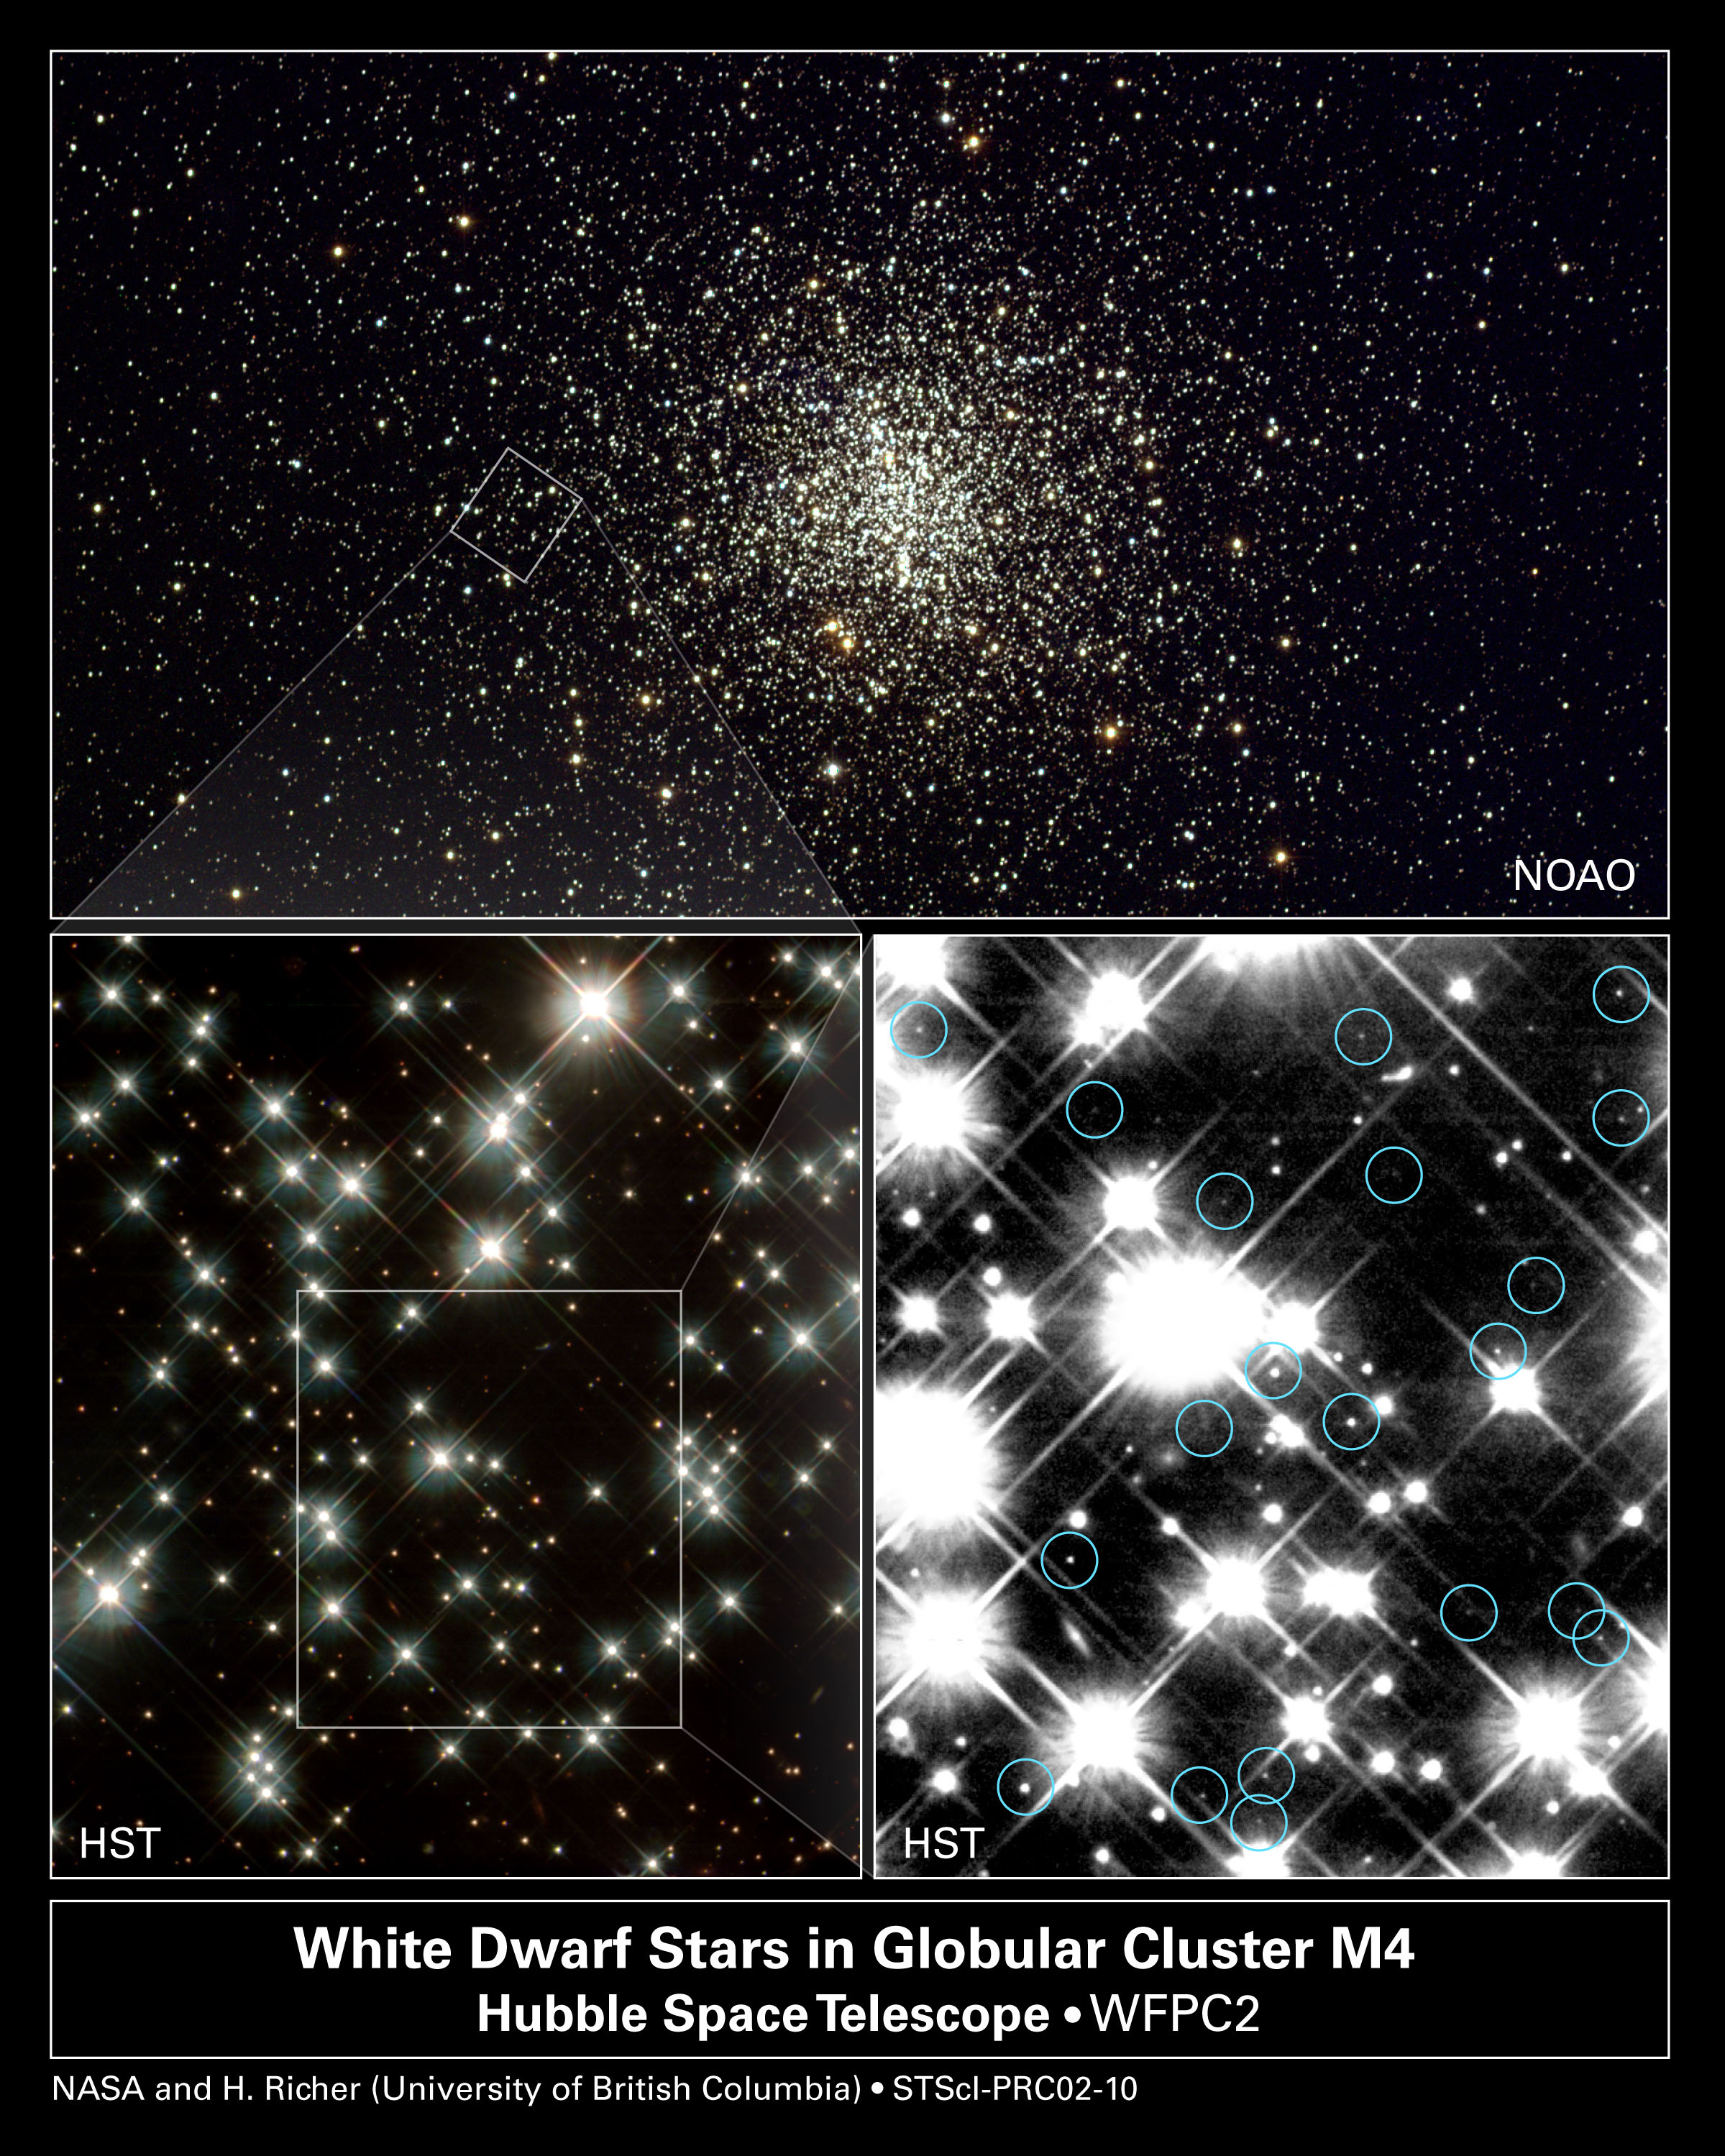

Universal Clocks

Pushing the limits of its powerful vision, the NASA/ESA Hubble Space Telescope has uncovered the oldest burned-out stars in our Milky Way Galaxy. These extremely old, dim stars provide a completely independent reading of the universe's age without relying on measurements of the universe's expansion.

The ancient white dwarf stars, as seen by Hubble, turn out to be 12 to 13 billion years old. Because earlier Hubble observations show that the first stars formed less than 1 billion years after the universe's birth in the big bang, finding the oldest stars puts astronomers well within arm's reach of calculating the absolute age of the universe.

Credit: NASA/ESA and NOAO/AURA/NSF